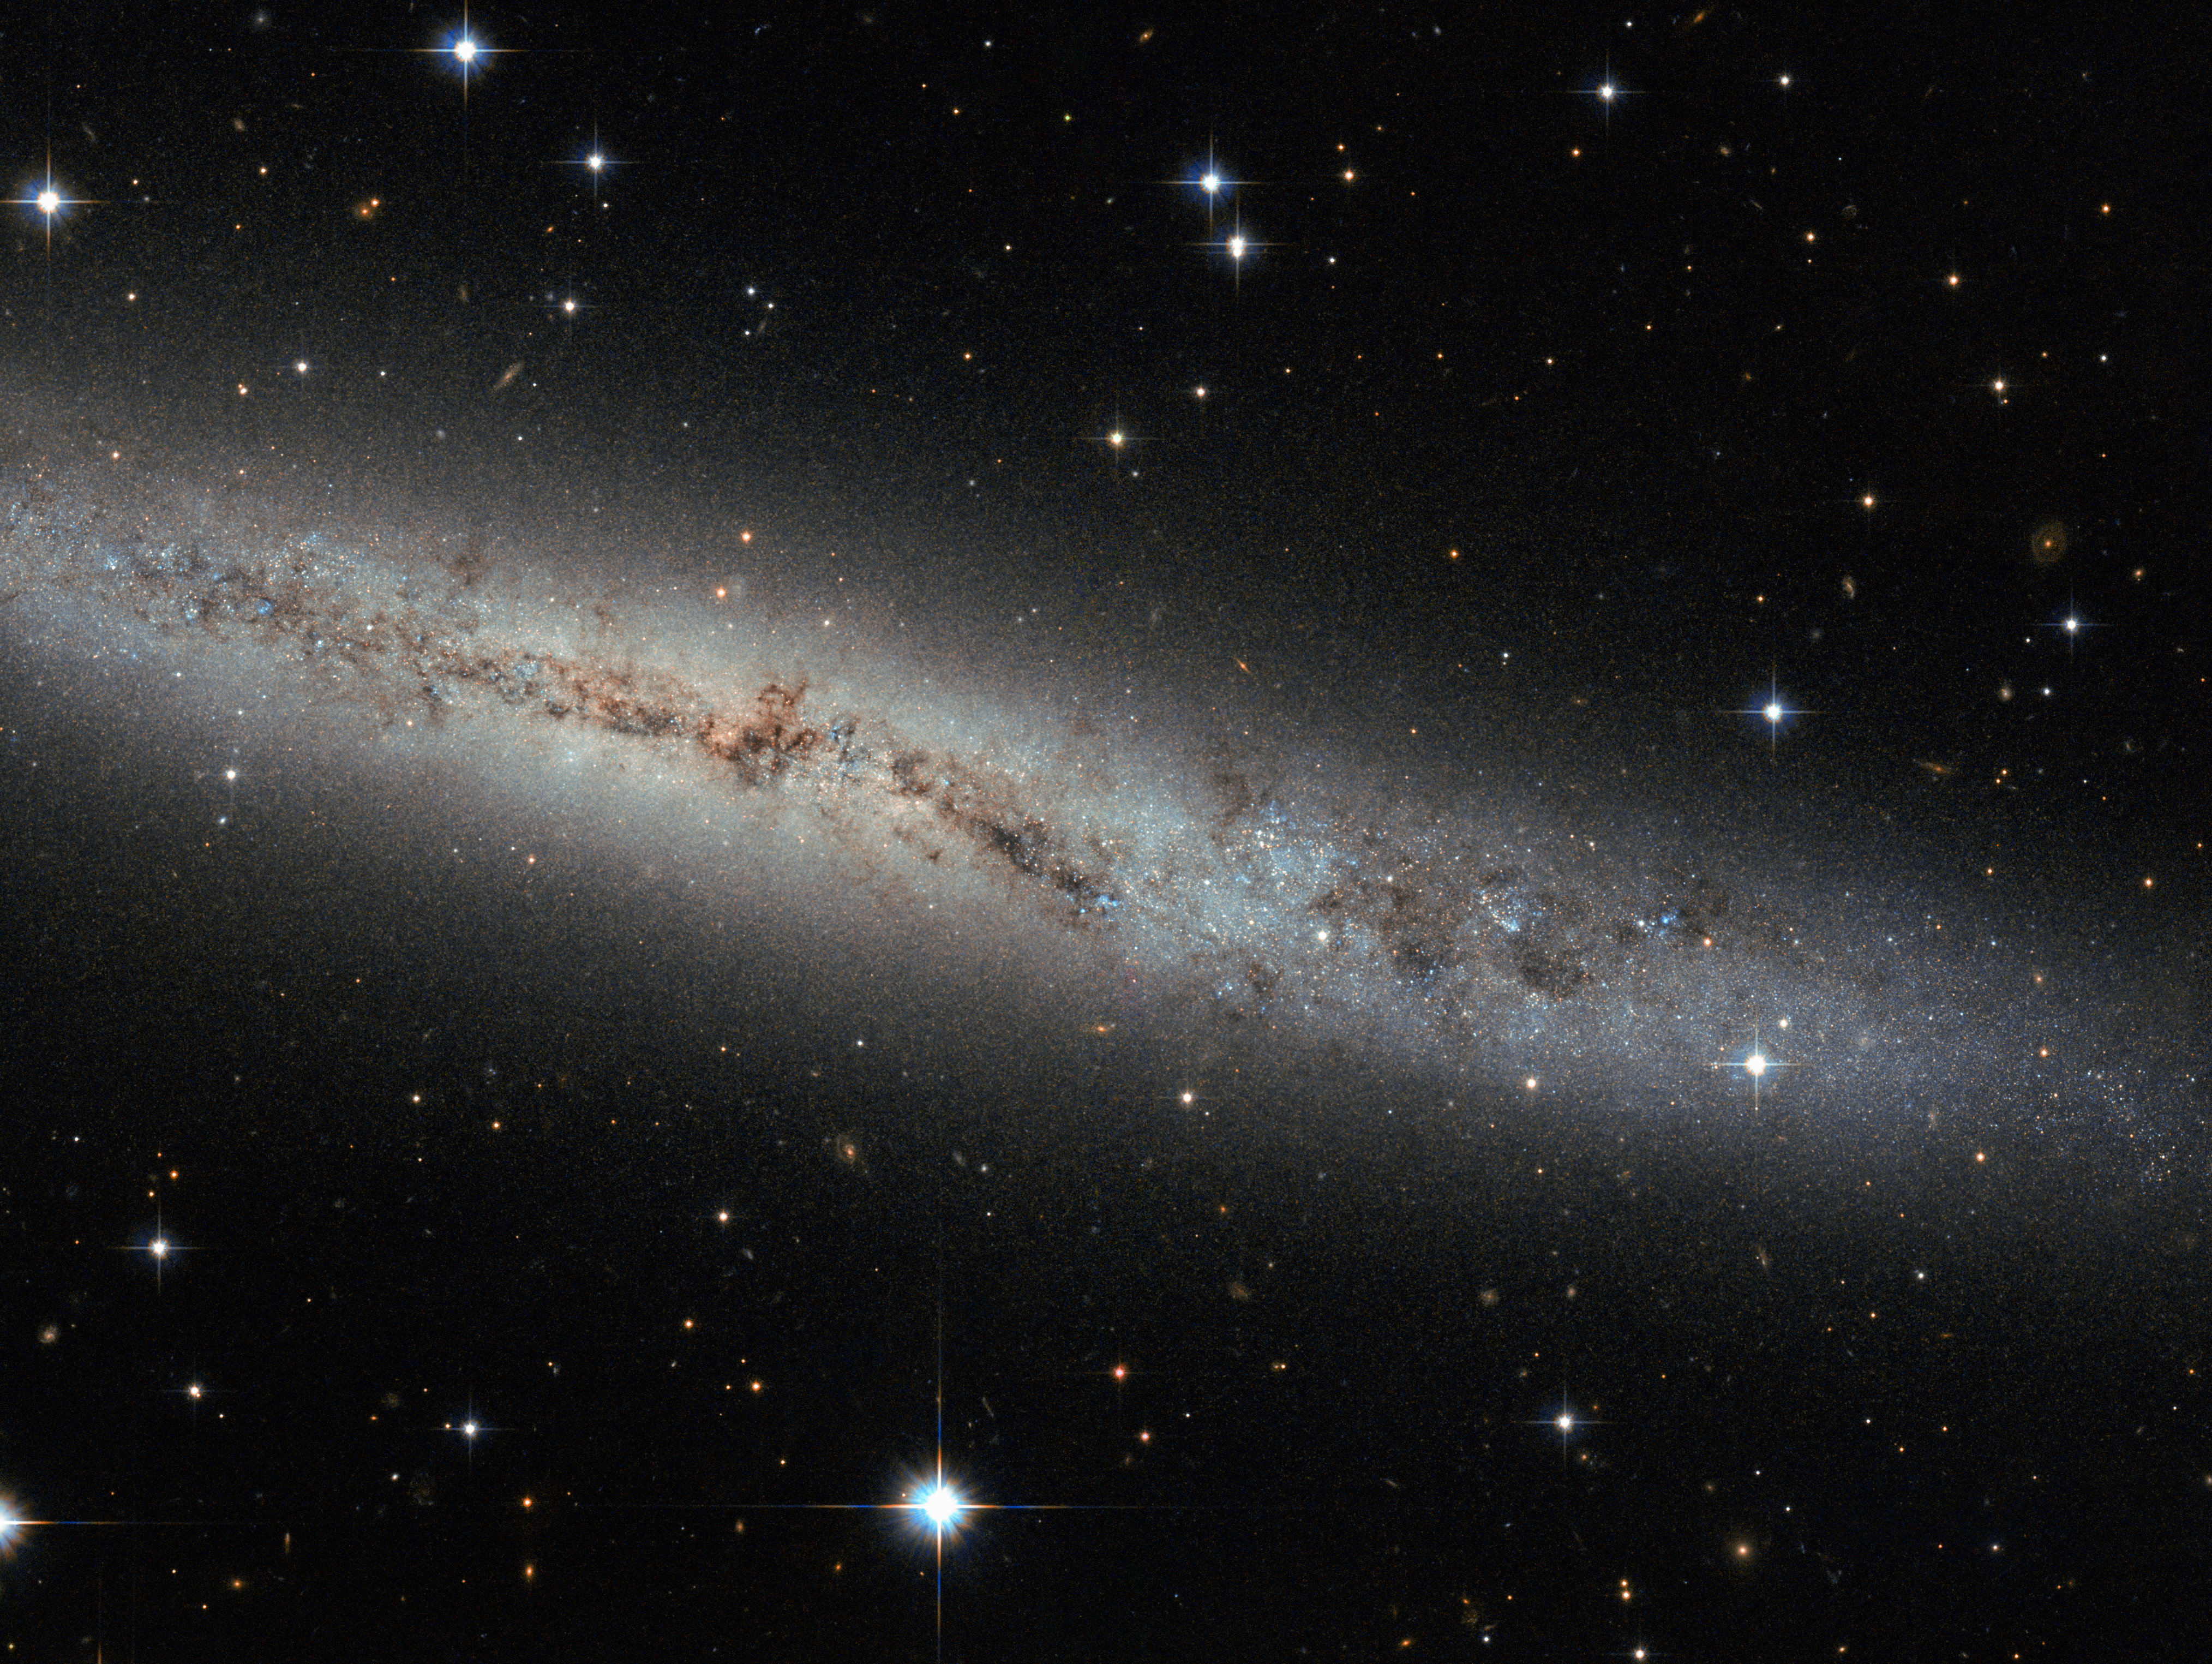

Flat as a pancake

Located some 25 million light-years away, this new Hubble image shows spiral galaxy ESO 373-8. Together with at least seven of its galactic neighbours, this galaxy is a member of the NGC 2997 group. We see it side-on as a thin, glittering streak across the sky, with all its contents neatly aligned in the same plane.

We see so many galaxies like this — flat, stretched-out pancakes — that our brains barely process their shape. But let us stop and ask: Why are galaxies stretched out and aligned like this?

Try spinning around in your chair with your legs and arms out. Slowly pull your legs and arms inwards, and tuck them in against your body. Notice anything? You should have started spinning faster. This effect is due to conservation of angular momentum, and it’s true for galaxies, too.

This galaxy began life as a humungous ball of slowly rotating gas. Collapsing in upon itself, it spun faster and faster until, like pizza dough spinning and stretching in the air, a disc started to form. Anything that bobbed up and down through this disc was pulled back in line with this motion, creating a streamlined shape.

Angular momentum is always conserved — from a spinning galactic disc 25 million light-years away from us, to any astronomer, or astronomer-wannabe, spinning in his office chair.

Credit: ESA/Hubble & NASA